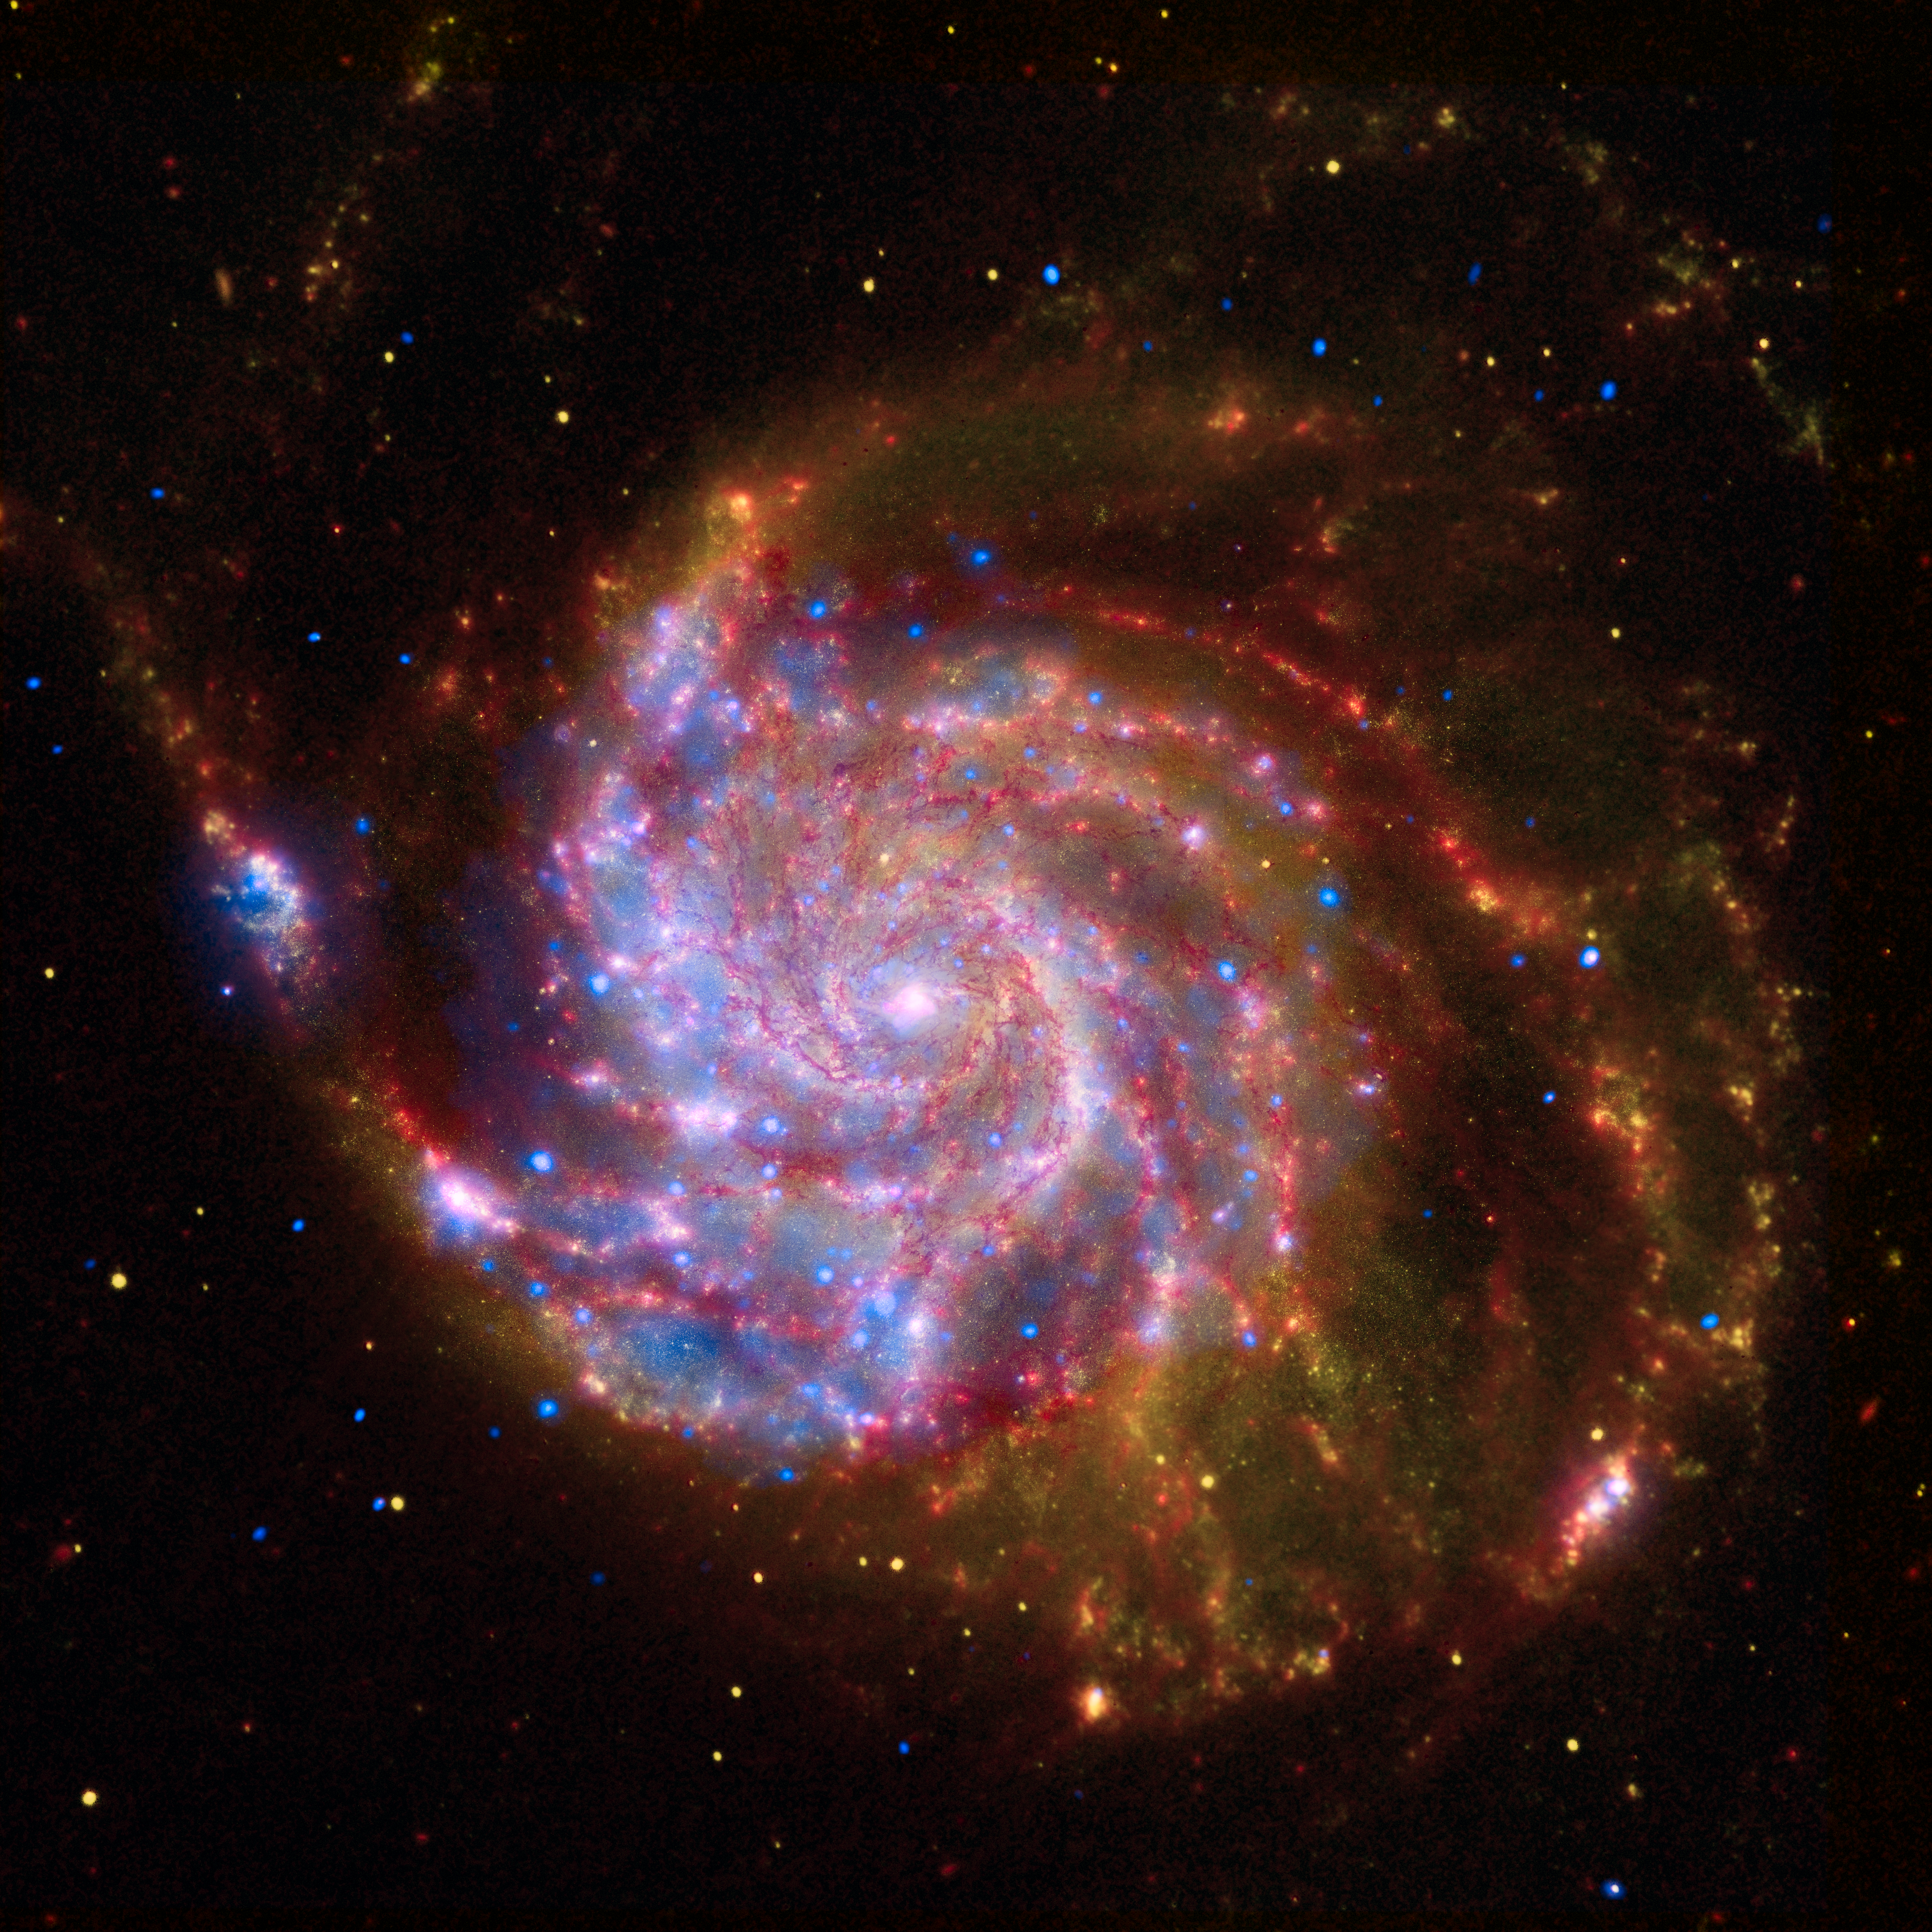

Spitzer-Hubble-Chandra Composite of M101

This image of the spiral galaxy Messier 101 is a composite of views from the Spitzer Space Telescope, Hubble Space Telescope, and Chandra X-ray Observatory. Each wavelength region shows different aspects of celestial objects and often reveals new objects that could not otherwise be studied. The red colour shows Spitzer's view in infrared light. It highlights the heat emitted by dust lanes in the galaxy where stars can form. The yellow colour is Hubble's view in visible light. Most of this light comes from stars, and they trace the same spiral structure as the dust lanes. The blue color shows Chandra's view in X-ray light. Sources of X-rays include million-degree gas, exploded stars, and material colliding around black holes. Such composite images allow astronomers to see how features seen in one wavelength match up with those seen in another wavelength. It's like seeing with a camera, night vision goggles, and X-ray vision all at once.

Credit: NASA, ESA, CXC, SSC and STScI